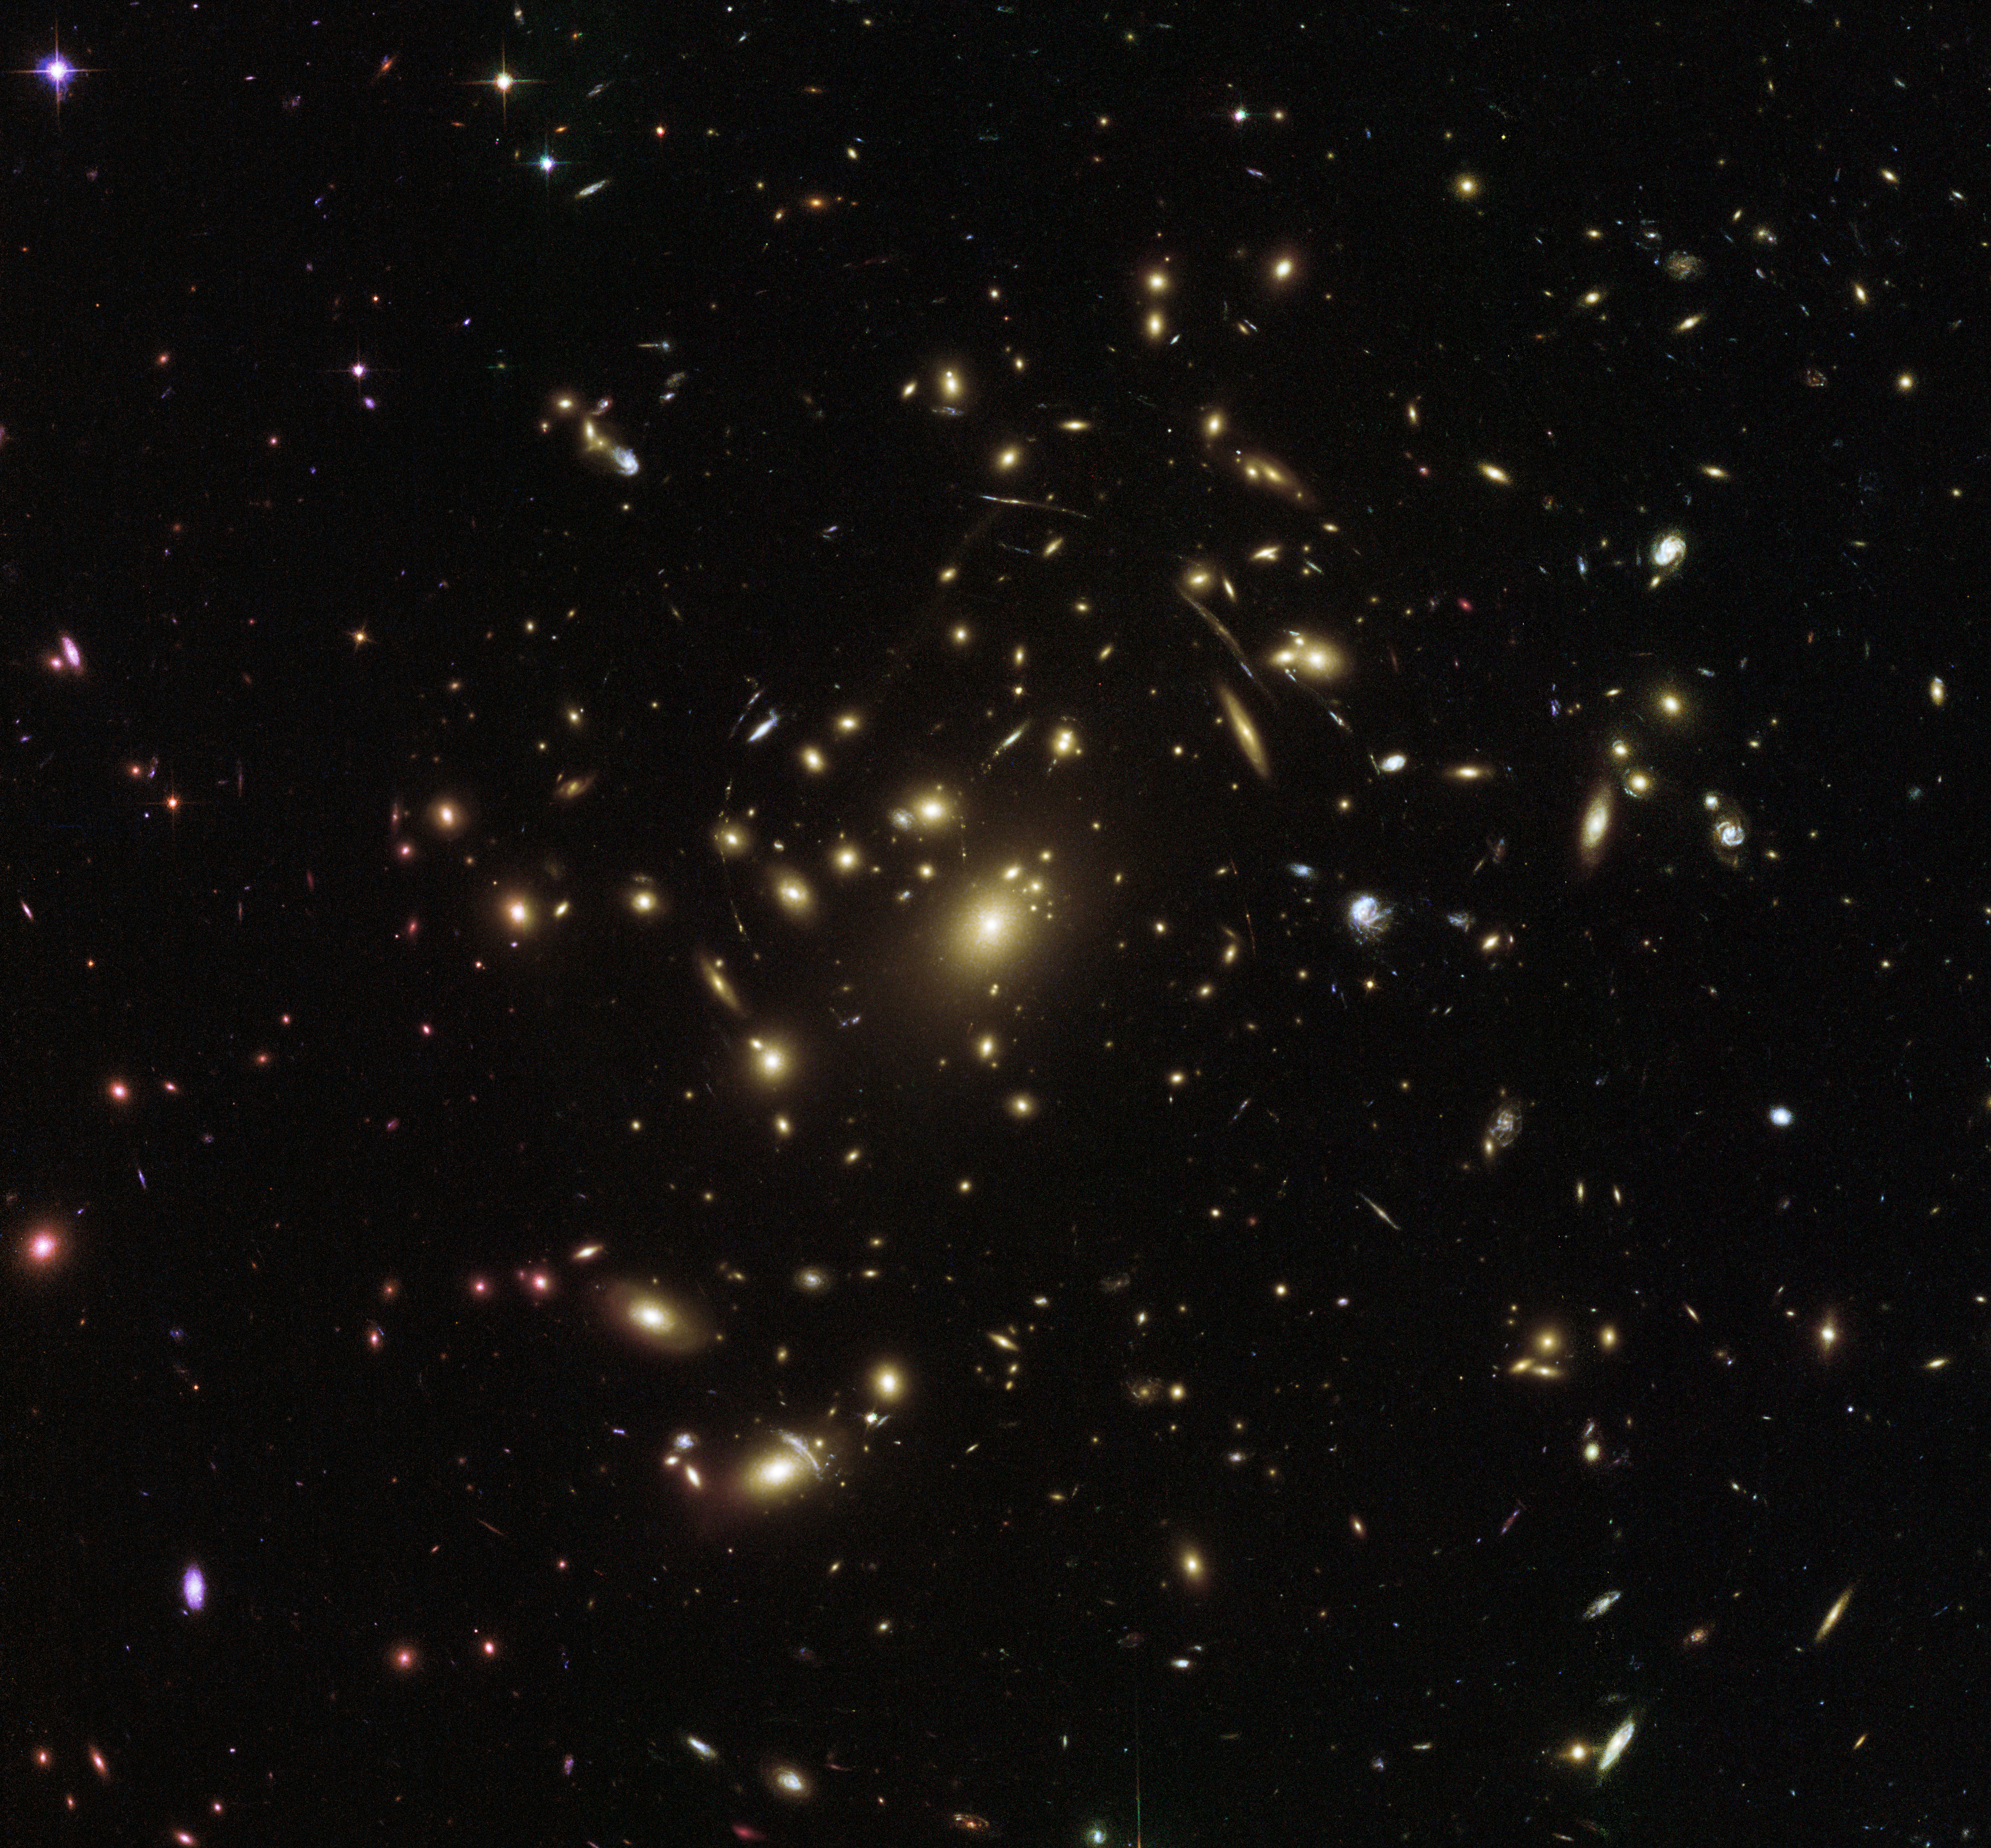

Streaks and stripes

This picturesque view from the NASA/ESA Hubble Space Telescope peers into the distant Universe to reveal a galaxy cluster called Abell 2537.

Galaxy clusters such as this one contain thousands of galaxies of all ages, shapes and sizes, together totalling a mass thousands of times greater than that of the Milky Way. These groupings of galaxies are colossal — they are the largest structures in the Universe to be held together by their own gravity.

Clusters are useful in probing mysterious cosmic phenomena like dark matter and dark energy, the latter of which is thought to define the geometry of the entire Universe. There is so much matter stuffed into a cluster like Abell 2537 that its gravity has visible effects on its surroundings. Abell 2537’s gravity warps the very structure of its environment (spacetime), causing light to travel along distorted paths through space. This phenomenon can produce a magnifying effect, allowing us to see objects that lie behind the cluster and are thus otherwise unobservable from Earth. Abell 2537 is a particularly efficient lens, as demonstrated by the stretched stripes and streaking arcs visible in the frame. These smeared shapes are in fact galaxies, their light heavily distorted by the gravitational field of Abell 2537.

This spectacular scene was captured by Hubble’s Advanced Camera for Surveys and Wide-Field Camera 3 as part of an observing programme called RELICS.

Credit: ESA/Hubble & NASA